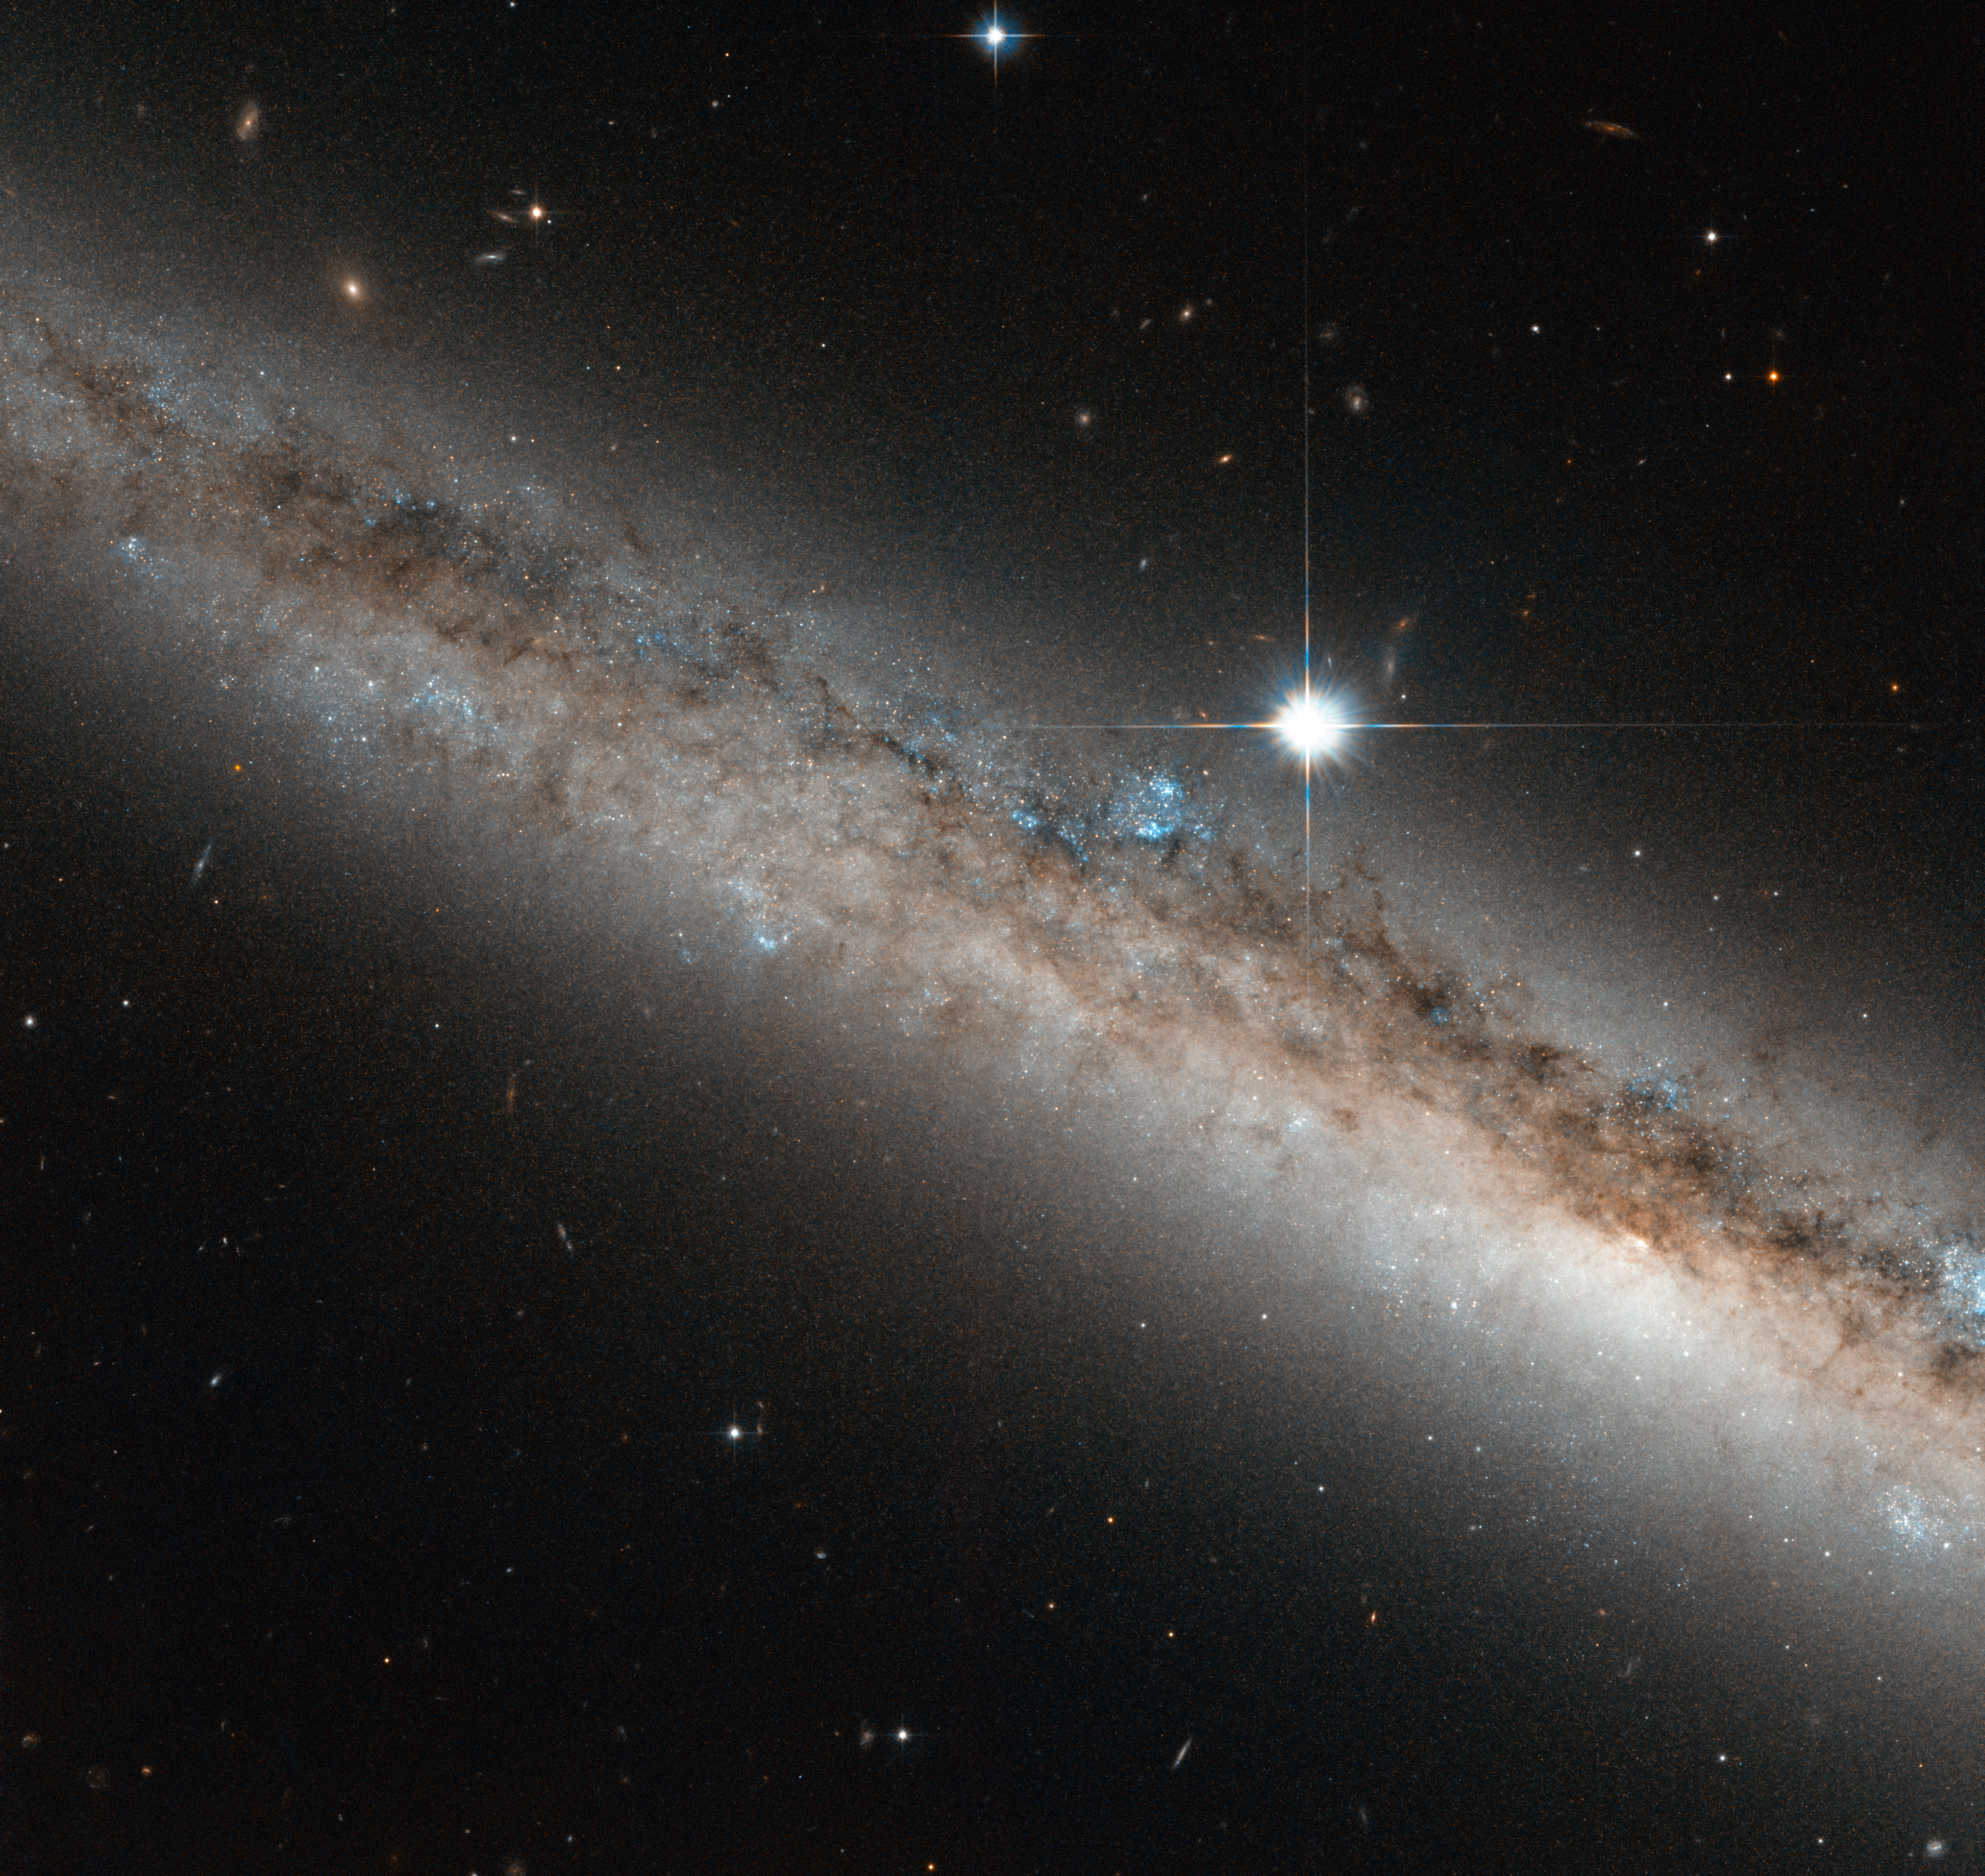

A spiral galaxy crowned by a star

Another treasure unearthed from the Hubble archives, this beautiful image shows a spiral galaxy named NGC 4517. Slightly bigger than our Milky Way, it is seen edge-on, crowned by a very bright star. The star is actually much closer to us than the galaxy, explaining why it appears to be so big and bright in the picture.

NGC 4517 is located approximately 40 million light-years away in the constellation of Virgo (The Virgin). It has a bright centre, but this is not visible in this Hubble image. Its orientation has led to it being included in many studies of globular clusters, clumps of stars that orbit the centres of galaxies like satellites.

The galaxy was discovered in 1784 by William Herschel, who described this region as having “a pretty bright star situated exactly north of the centre of an extended milky ray”. Of course the “milky ray” seen by Herschel is actually this spiral galaxy, but with his 17th century observing gear he could only tell that there a fuzzy, blurry structure below the much brighter star.

This image is composed from visible and infrared light gathered by NASA/ESA Hubble Space Telescope. A version of this image was entered into the Hubble’s Hidden treasures image processing competition by contestant Gilles Chapdelaine.

Credit: ESA/Hubble & NASA Acknowledgement: Gilles Chapdelaine